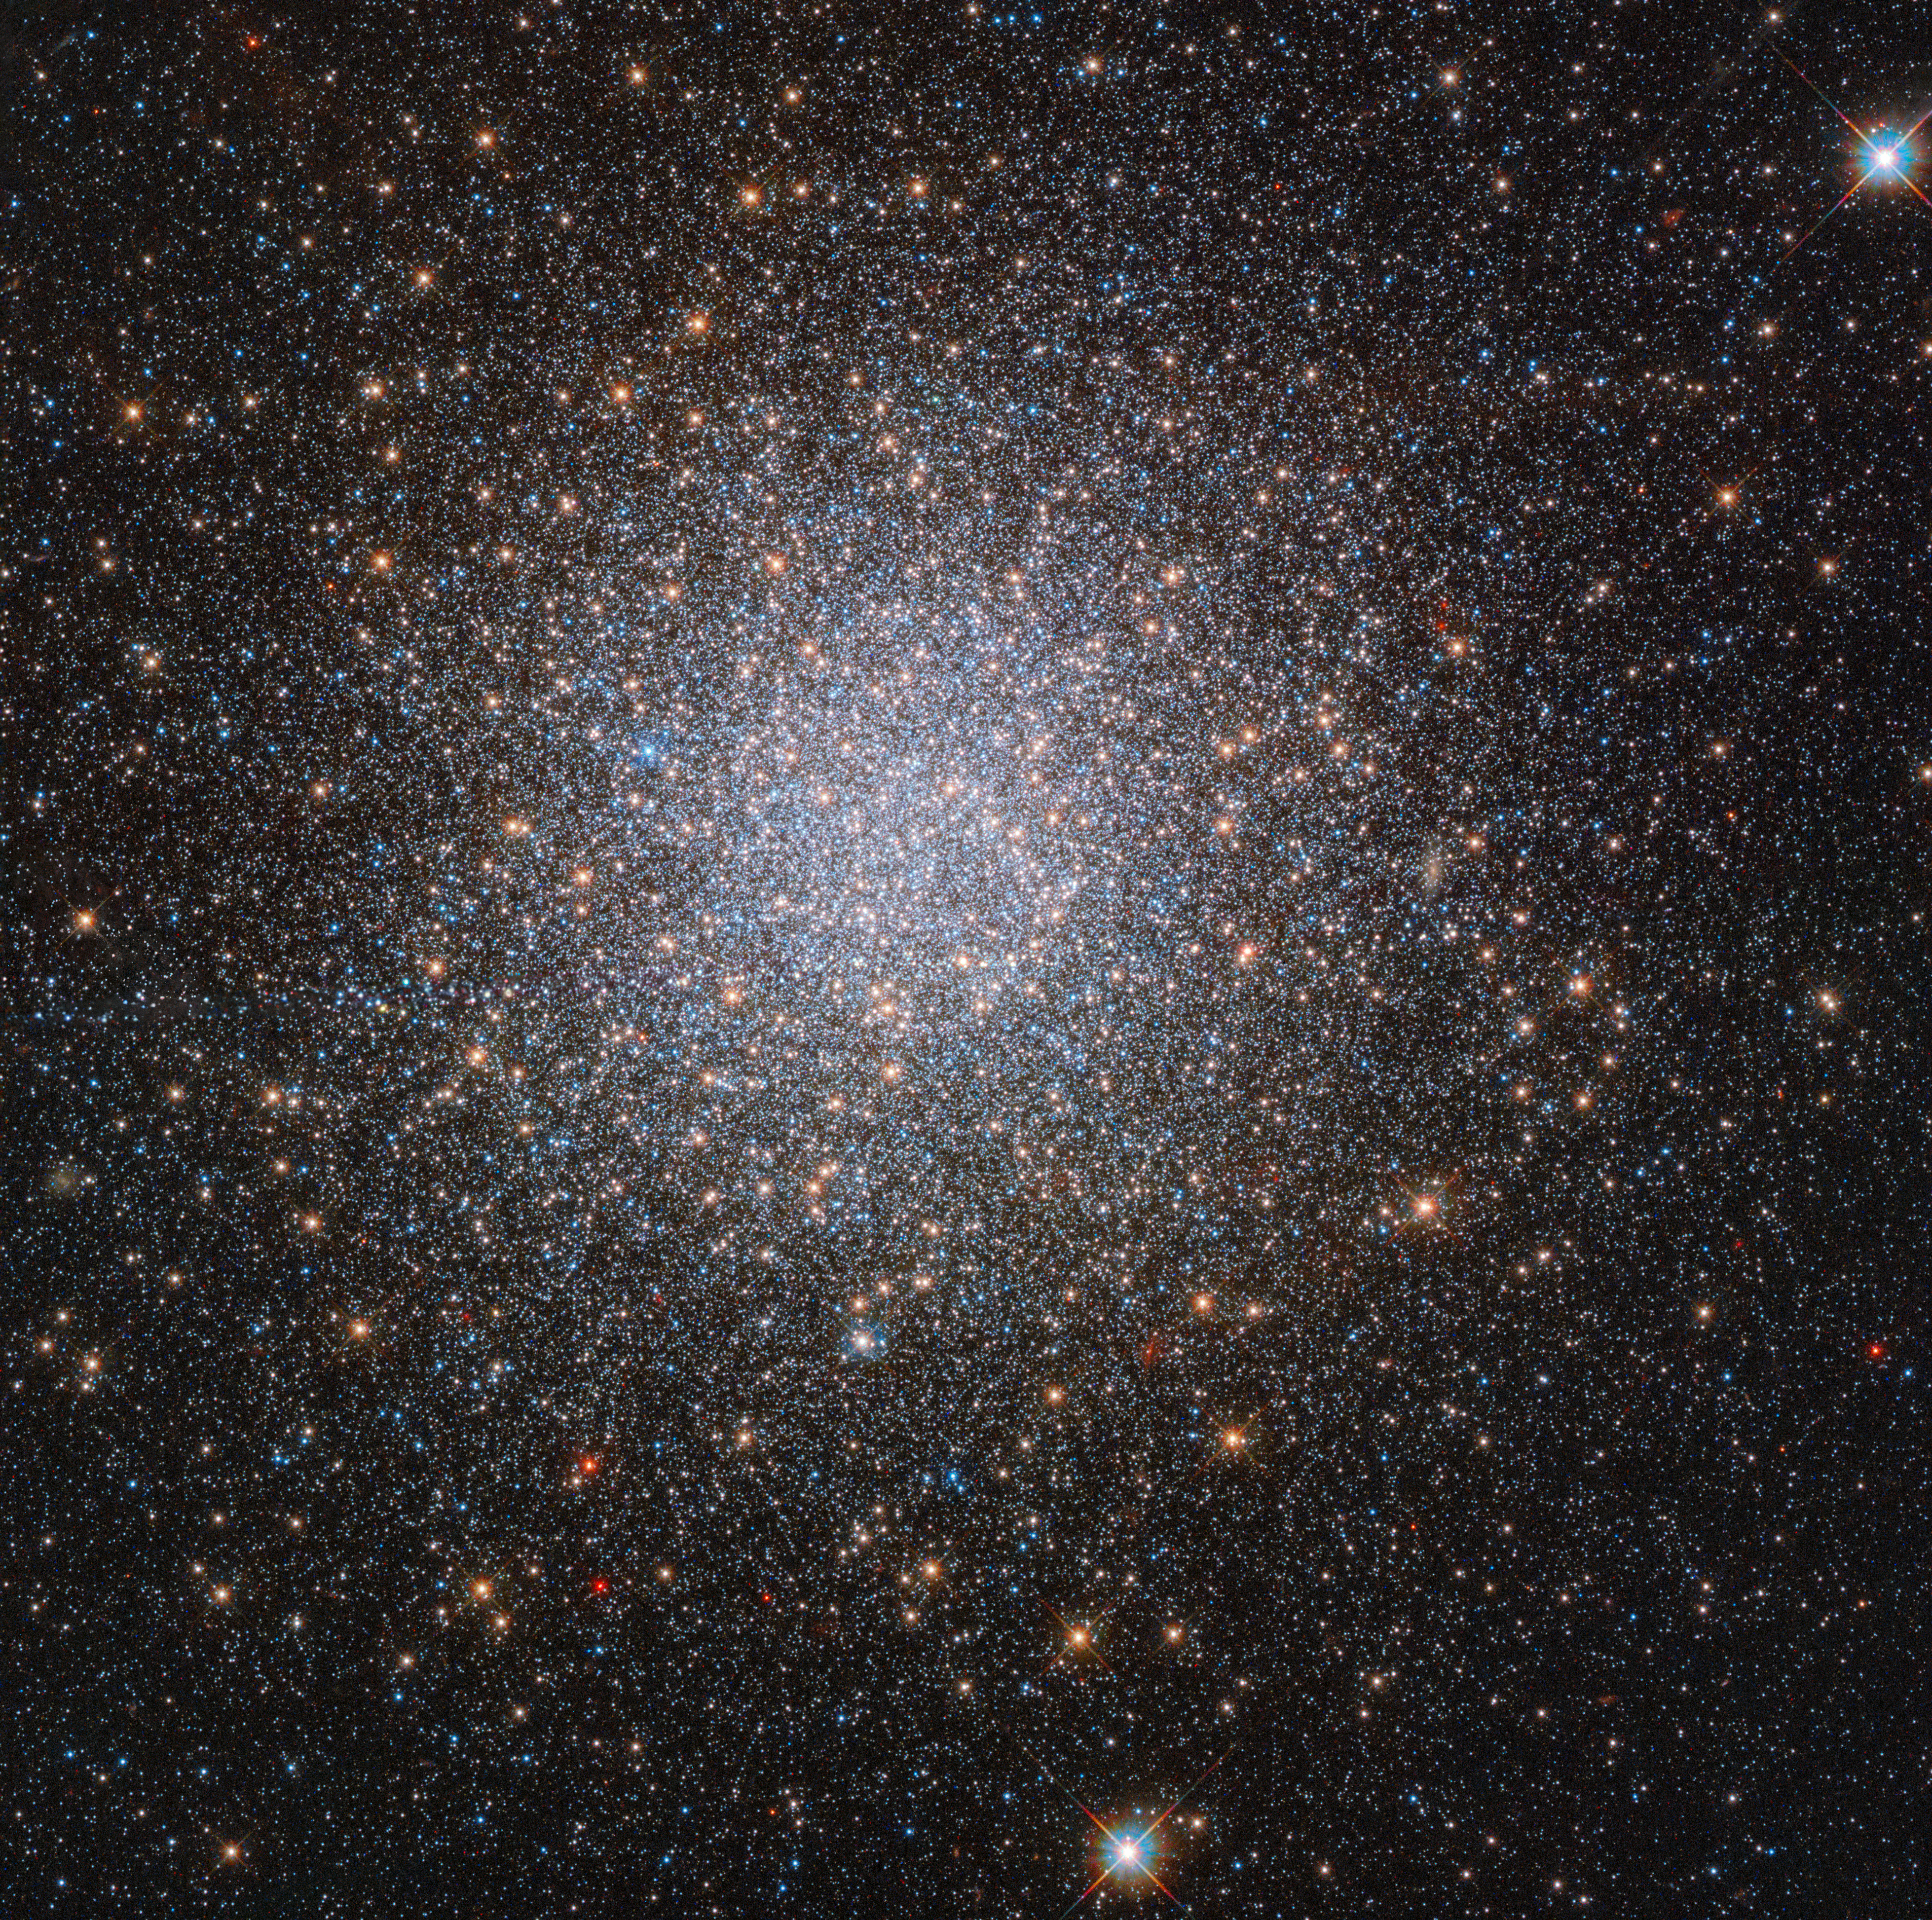

The two mysterious populations of NGC 2419

Globular clusters like NGC 2419, visible in this image taken with the NASA/ESA Hubble Space Telescope, are not only beautiful, but also fascinating. They are spherical groups of stars which orbit the centre of a galaxy; in the case of NGC 2419, that galaxy is the Milky Way. NGC 2419 can be found around 300 000 light-years from the Solar System, in the constellation Lynx (the Lynx).

The stars populating globular clusters are very similar to one another, with similar properties such as metallicity. The similarity of these stellar doppelgängers is due to their formation early in the history of the galaxy. As the stars in a globular cluster all formed at around the same time, they tend to display reasonably homogeneous properties. It was believed that this similarity also extended to the stellar helium content; that is, it was thought that all stars in a globular cluster would contain comparable amounts of helium.

However, Hubble’s observations of NGC 2419 have shown that this is not always the case. This surprising globular cluster turns out to be made up of two separate populations of red giant stars, one of which is unusually helium-rich. Other elements within the different stars in NGC 2419 vary too — nitrogen in particular. On top of this, these helium-rich stars were found to be predominantly in the centre of the globular cluster, and to be rotating. These observations have raised questions about the formation of globular clusters; did these two drastically different groups of stars form together? Or did this globular cluster come into being by a different route entirely?

Credit: ESA/Hubble & NASA, S. Larsen et al.